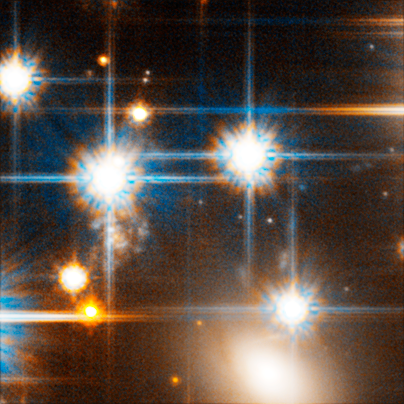

Faint White Dwarf Star in Globular Cluster NGC 6397

The image pinpoints one of the dim white dwarfs seen by Hubble (in the centre of the image, between the two brighter stars). The white dwarf has been cooling for billions of years. It is so cool that instead of looking red, it has undergone a chemical change in its atmosphere that makes it appear blue.

Credit: NASA, ESA and H. Richer (University of British Columbia)